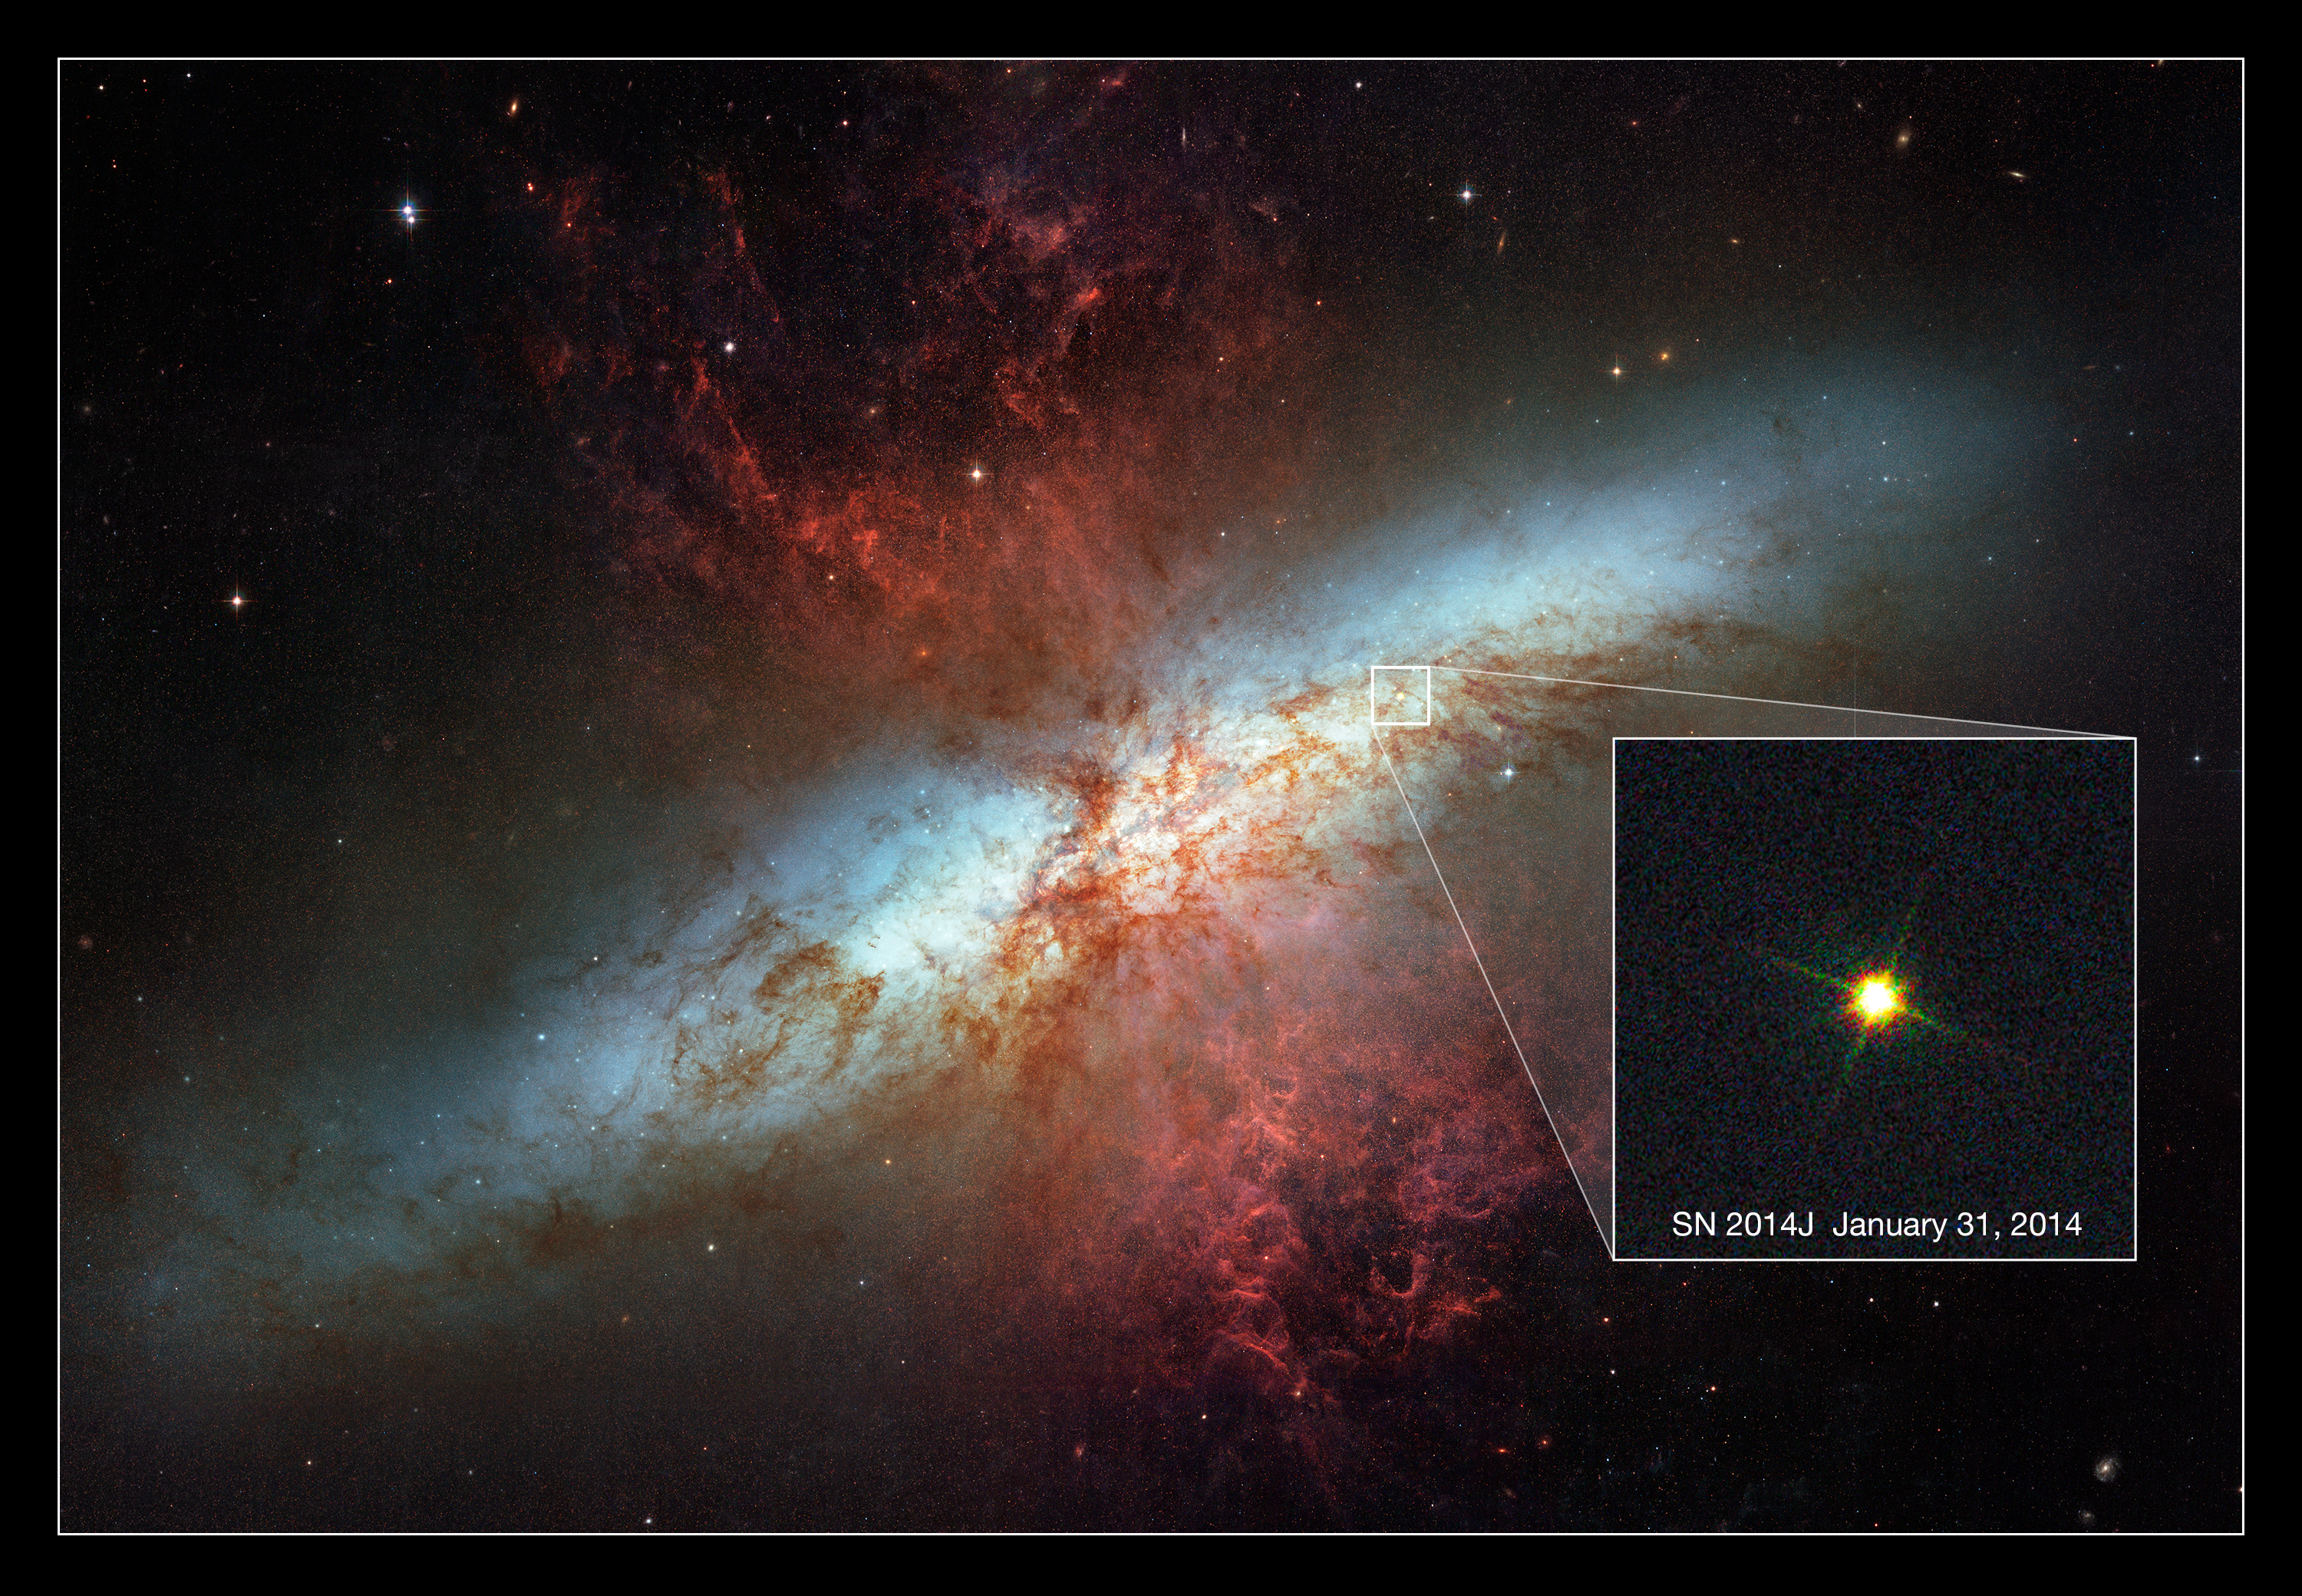

Hubble views new supernova in Messier 82

Spiral galaxy Messier 82 has long been known for its remarkable starburst activity, caused by interactions with its near neighbour Messier 81, and has been the subject of intense study for many years. On 21 January 2014, astronomers at the University of London Observatory in London, UK, pointed their telescope at the galaxy and spied something peculiar… an intensely bright spot seemed to have suddenly appeared within the galaxy [1].

This bright spot is actually a new supernova known as SN 2014J — the closest supernova to Earth in recent decades! Since its discovery, SN 2014J has been confirmed as a type Ia supernova, making it the closest of its type to Earth in over 40 years (since SN 1972E) [2]. This new NASA/ESA Hubble Space Telescope image is set against a previous mosaic of Messier 82 from 2006 (heic0604a), and shows the supernova as an intensely bright spot towards the bottom right of the frame.

Type Ia supernovae are even more exciting for astronomers, as they have particular properties that we can use to probe the distant Universe. They are used as standard candles to measure distances and help us understand the scale of the cosmos. Catching such a supernova so soon after its explosion is very unusual; this early discovery will enable astronomers to explore its evolution in great detail, and to potentially infer the properties of its progenitor star.

Messier 82 is several times more luminous than our Milky Way. Because it is only 12 million light-years away, it is one of the brighter galaxies in the northern sky. It can be found in the constellation of Ursa Major (The Great Bear). The supernova is currently visible through a modest amateur telescope, so why not see if you can spot it from your back garden?

The image shown here was taken on 31 January 2014 with Hubble’s Wide Field Camera 3. This image is inset into a photo mosaic of the entire galaxy taken in 2006 with Hubble’s Advanced Camera for Surveys.

Notes
[1] The supernova was discovered at 19:20 GMT by a team of students — Ben Cooke, Tom Wright, Matthew Wilde and Guy Pollack — assisted by Dr Steve Fossey. The supernova is visible in pre-discovery images of the galaxy.

[2] Supernova SN 1987A, discovered in 1987, was closer to Earth than SN 2014J, but it was a type II supernova rather than a type Ia.

Credit: New supernova image: NASA, ESA, A. Goobar (Stockholm University), and Hubble Heritage
Image of Messier 82: NASA, ESA and the Hubble Heritage Team (STScI/AURA). Acknowledgment: J. Gallagher (University of Wisconsin), M. Mountain (STScI) and P. Puxley (NSF).